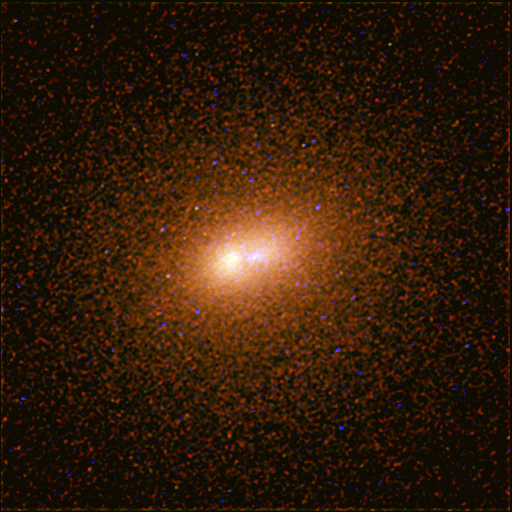

Andromeda Galaxy (M31) - HST WFPC2

A Hubble WFPC2 image of the core of M31. Astronomers believe the two bright objects are a ring of red stars and a disk of blue stars.

Credit: NASA, ESA and T. Lauer (NOAO/AURA/NSF)